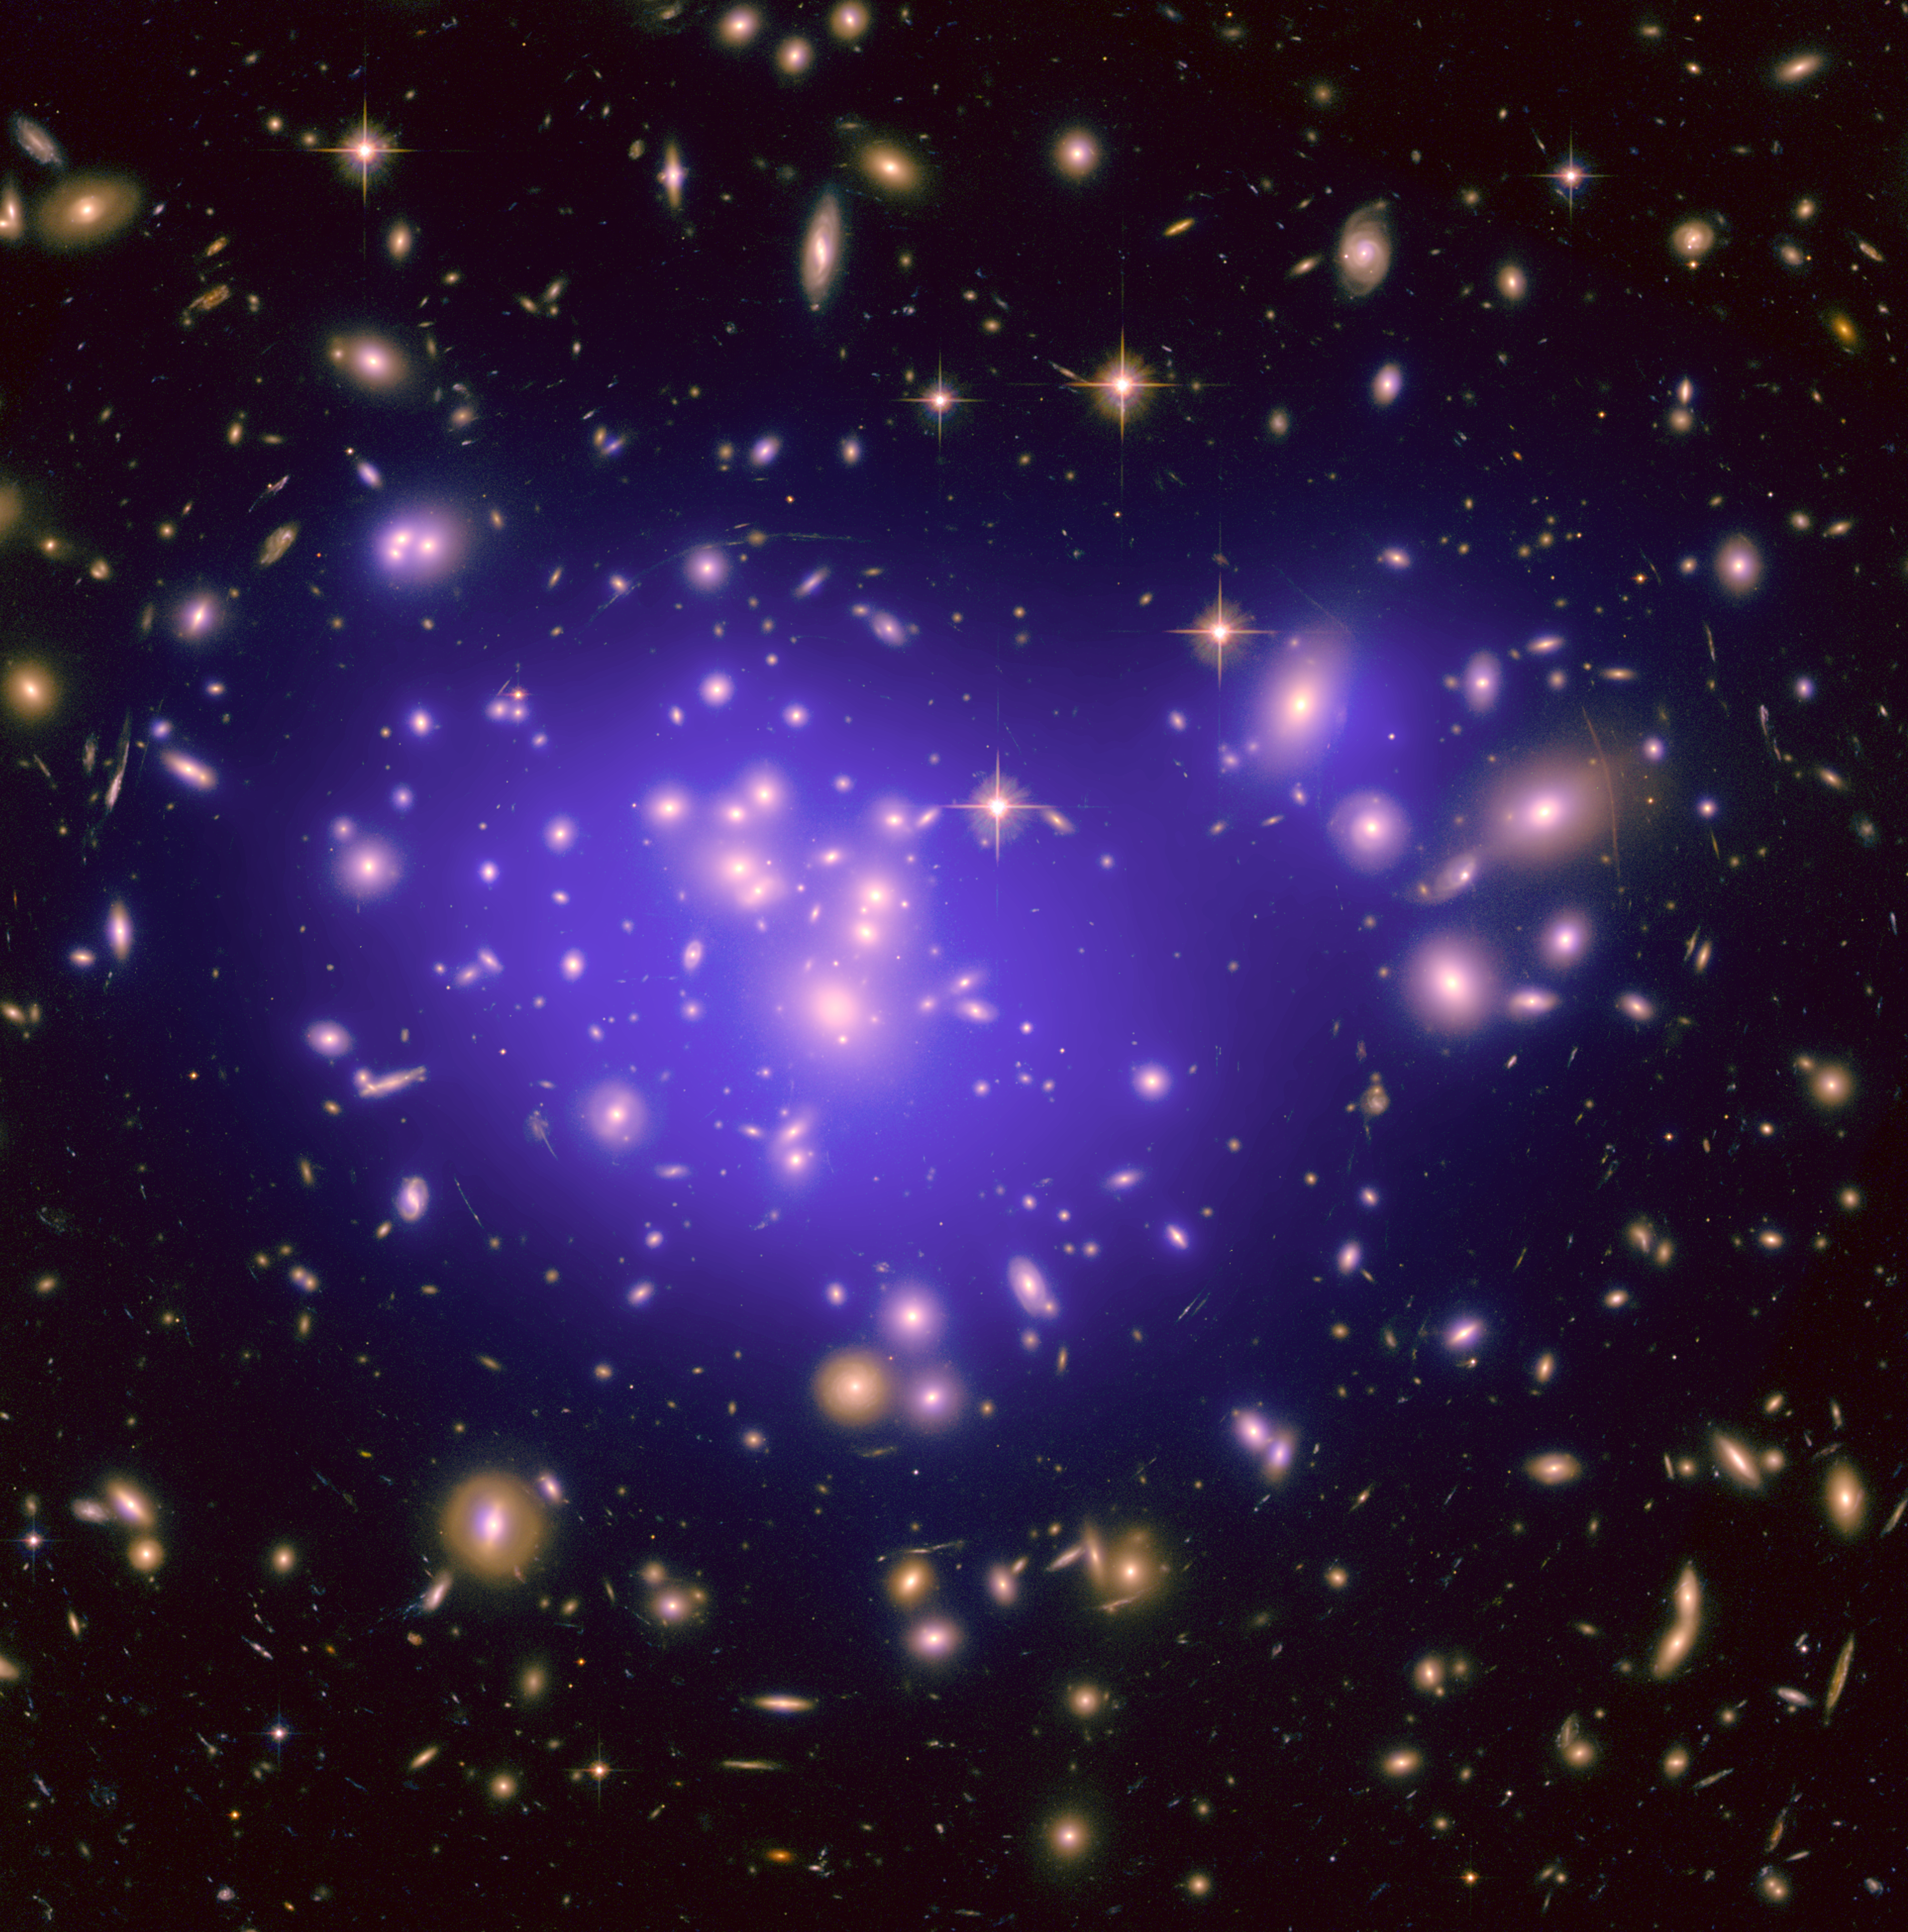

Mass map of Abell 1689

This image shows the galaxy cluster Abell 1689, with the mass distribution of the dark matter in the gravitational lens overlaid (in purple). The mass in this lens is made up partly of normal (baryonic) matter and partly of dark matter. Distorted galaxies are clearly visible around the edges of the gravitational lens. The appearance of these distorted galaxies depends on the distribution of matter in the lens and on the relative geometry of the lens and the distant galaxies, as well as on the effect of dark energy on the geometry of the Universe.

Credit: NASA, ESA, E. Jullo (JPL/LAM), P. Natarajan (Yale) and J-P. Kneib (LAM).